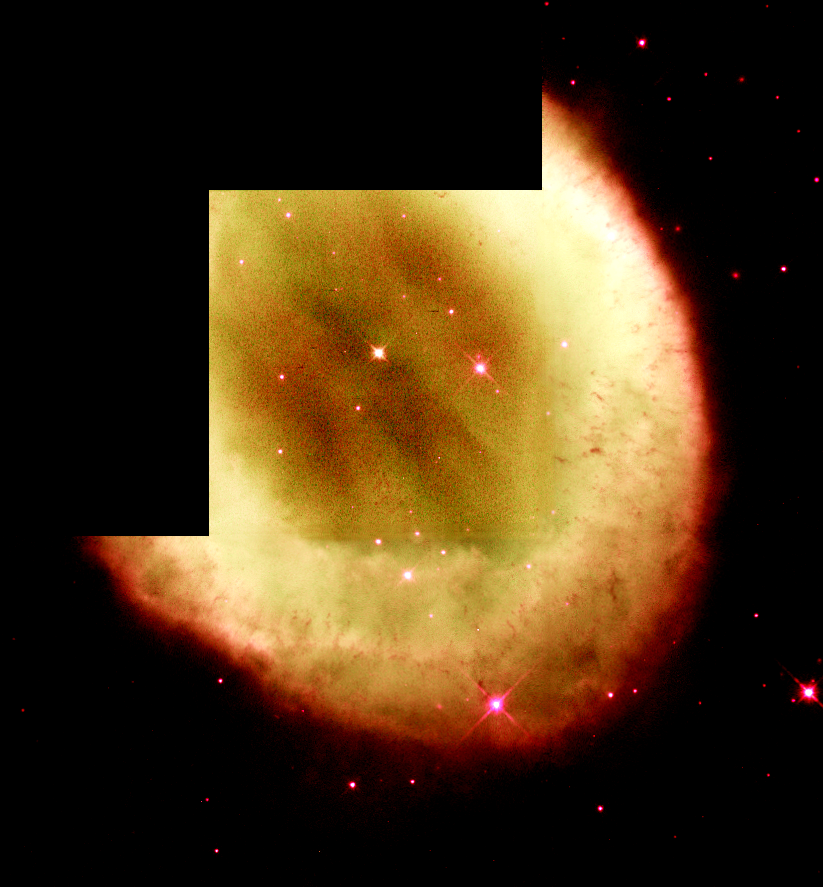

NGC 6720

This image is a part of the Hubble Gallery of Planetary Nebulae.

Credit: Howard Bond (ST ScI) and NASA/ESA